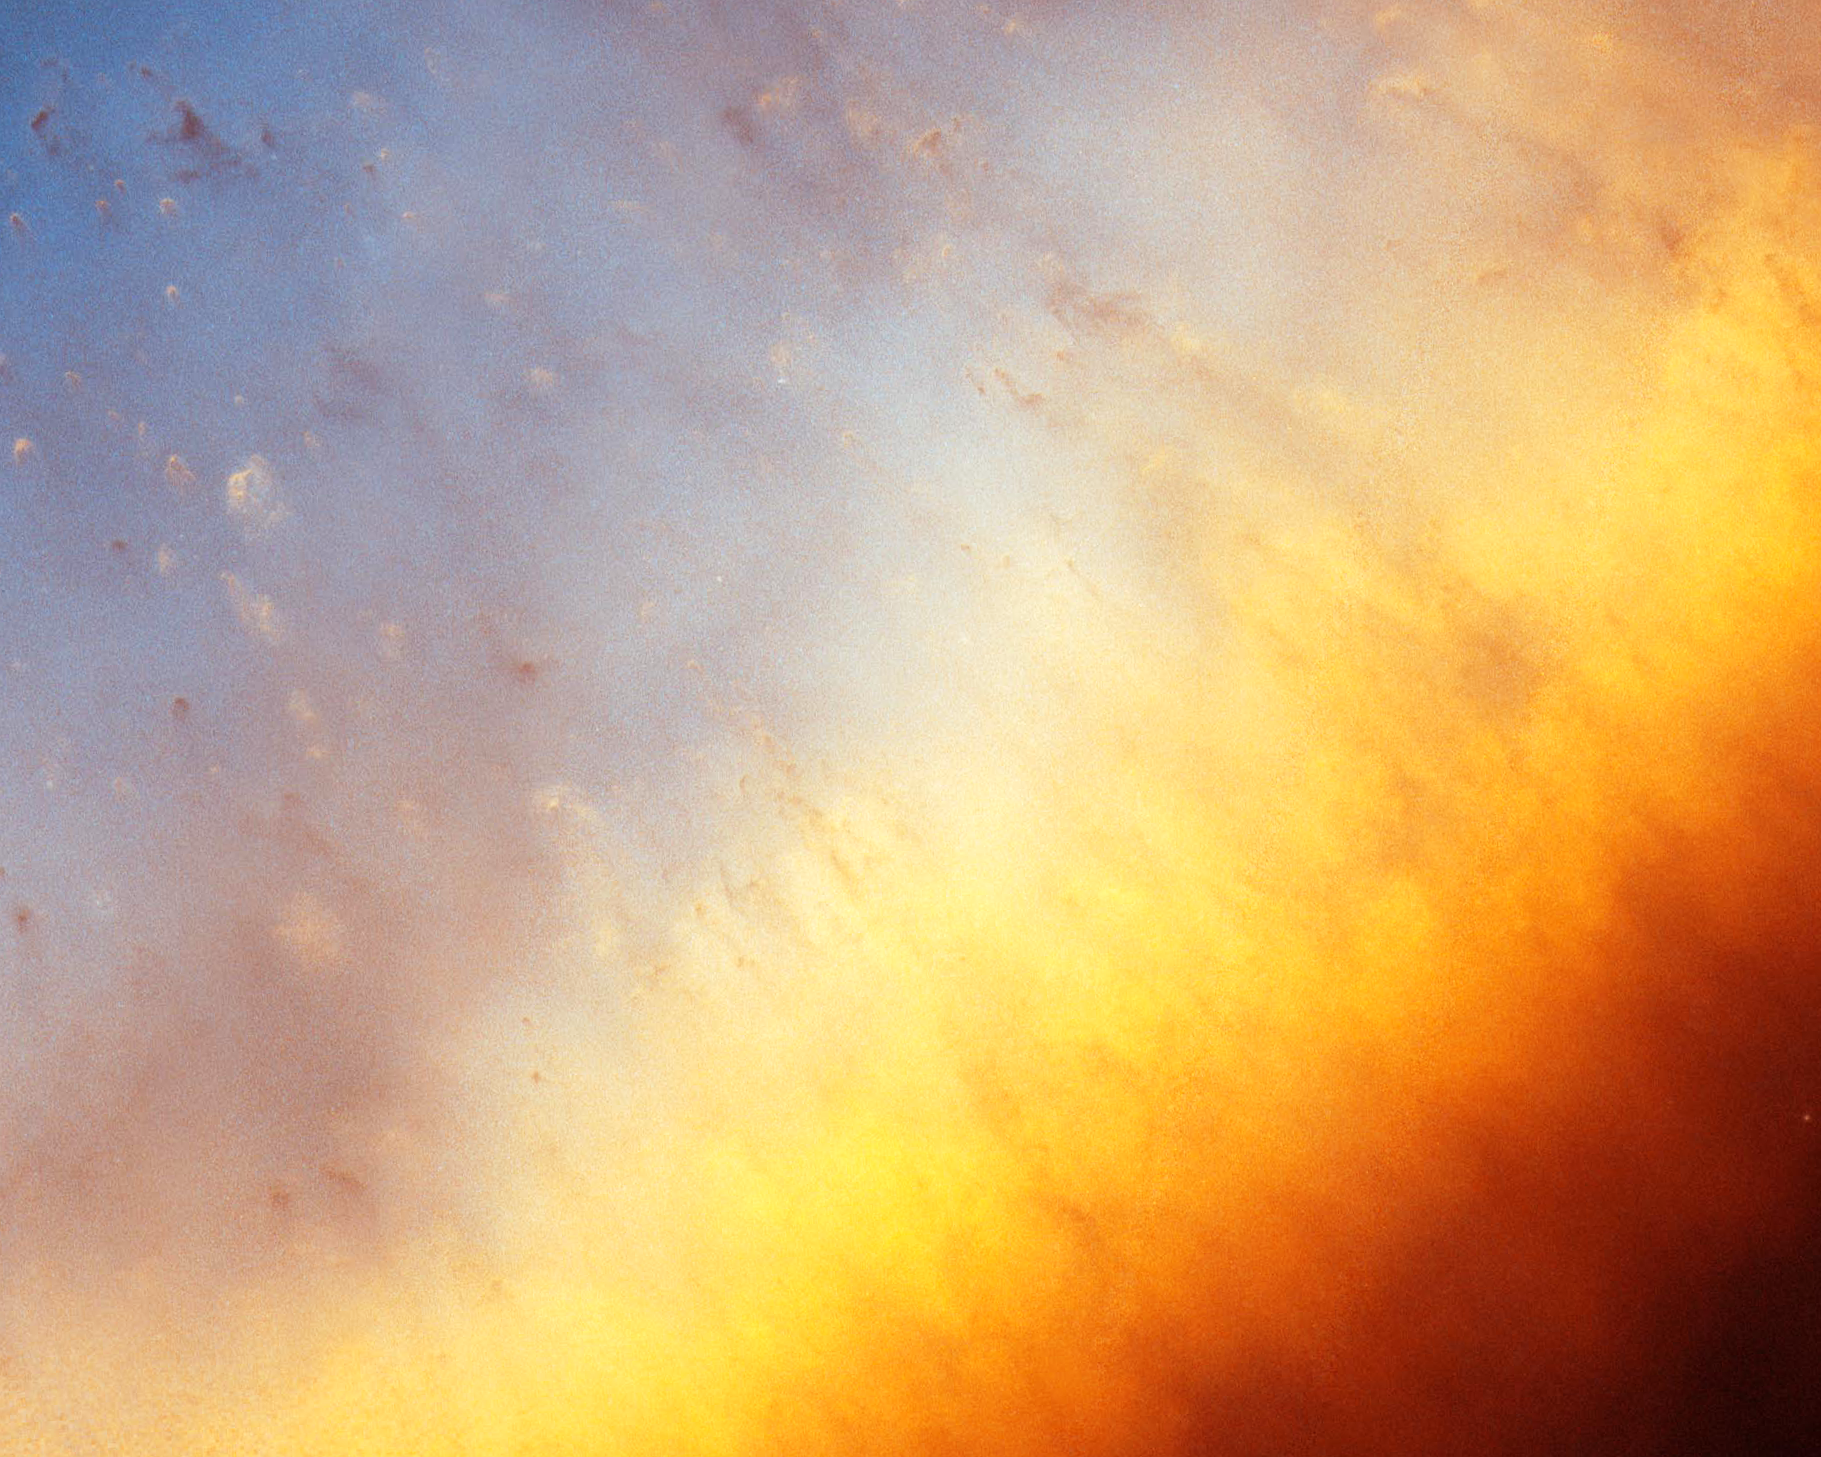

Helix Nebula: Detail Image 4

Detailed image of the Helix Nebula.

Credit: NASA, NOAO, ESA, the Hubble Helix Nebula Team, M. Meixner (STScI), and T.A. Rector (NRAO).